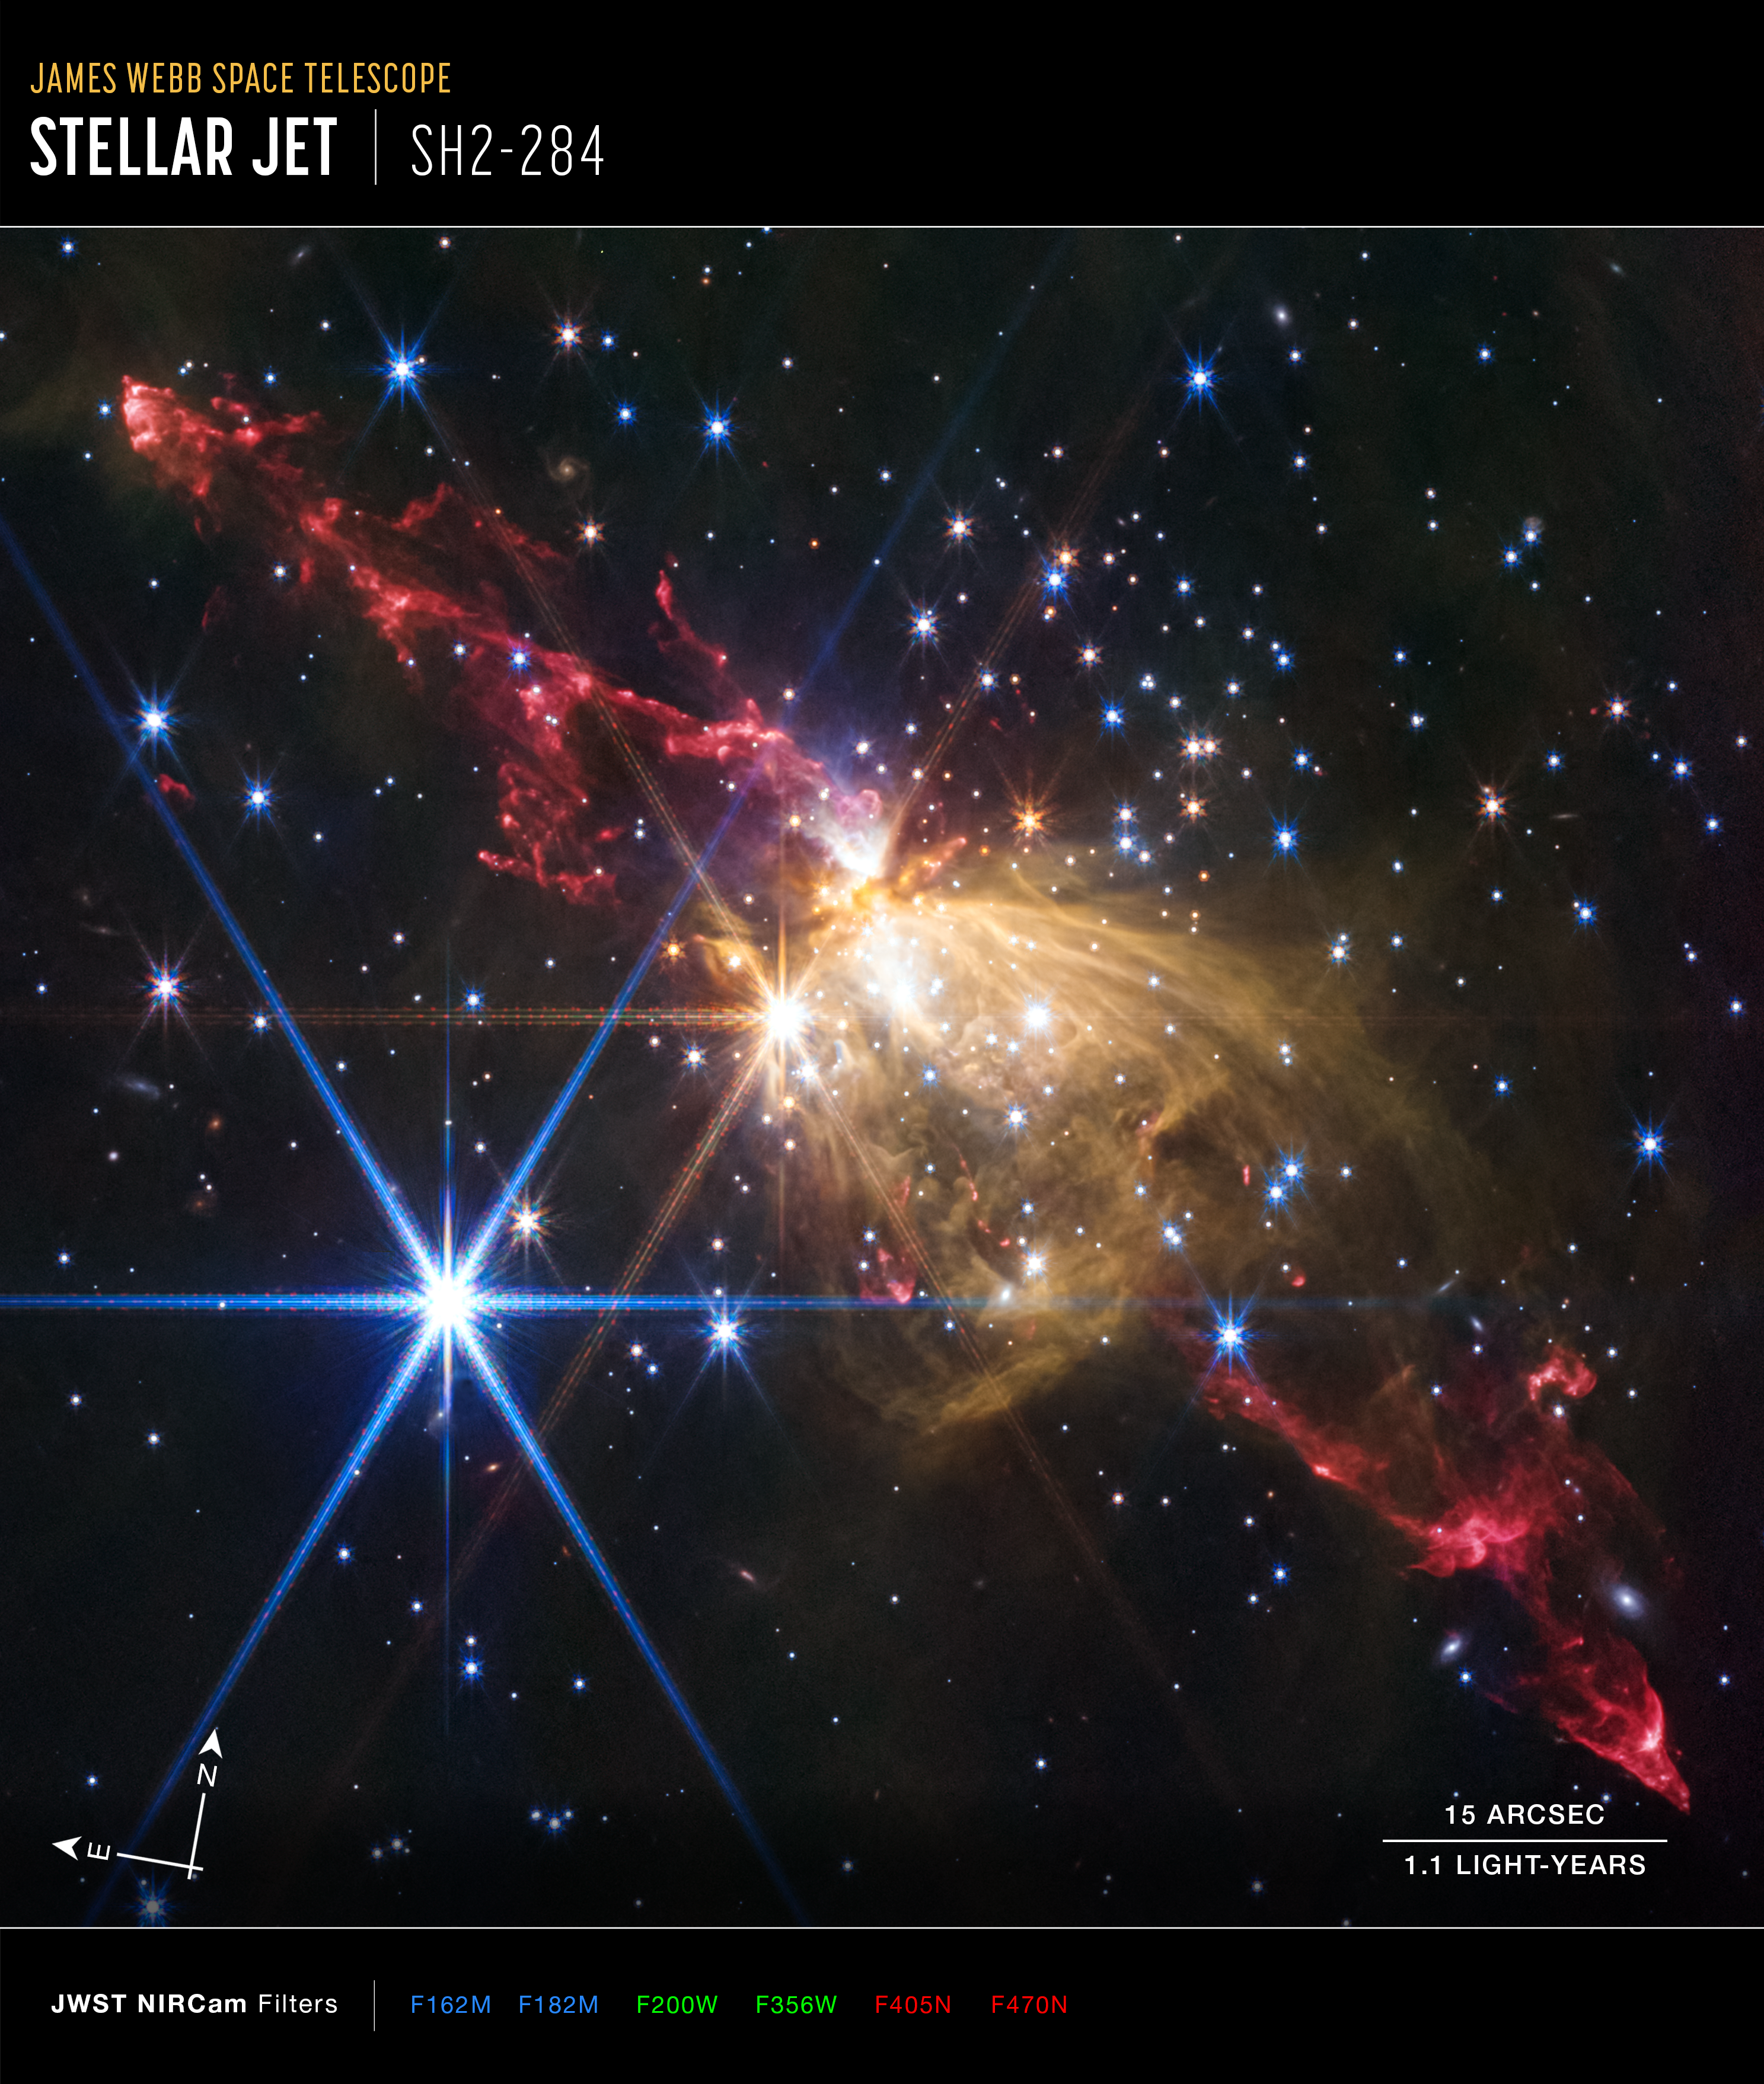

Stellar jet in Sh2-284 (NIRCam image, annotated)

This image of the stellar jet in Sh2-284, captured by the NASA/ESA/CSA James Webb Space Telescope’s NIRCam (Near-Infrared Camera), shows compass arrows, scale bar, and color key for reference.

The north and east compass arrows show the orientation of the image on the sky. Note that the relationship between north and east on the sky (as seen from below) is flipped to the direction arrows on a map of the ground (as seen from above).

The scale bar is labeled in light-years, which is the distance that light travels in one Earth-year, and arcsec (It takes 1.1 years for light to travel a distance equal to the length of the scale bar.) One light-year is equal to about 5.88 trillion miles or 9.46 trillion kilometers.

This image shows invisible near-infrared wavelengths of light that have been translated into visible-light colors. The color key shows which NIRCam filters were used when collecting the light. The color of each filter name is the visible light color used to represent the infrared light that passes through that filter.

Credit: NASA, ESA, CSA, STScI, Y. Cheng (NAOJ), J. DePasquale (STScI)